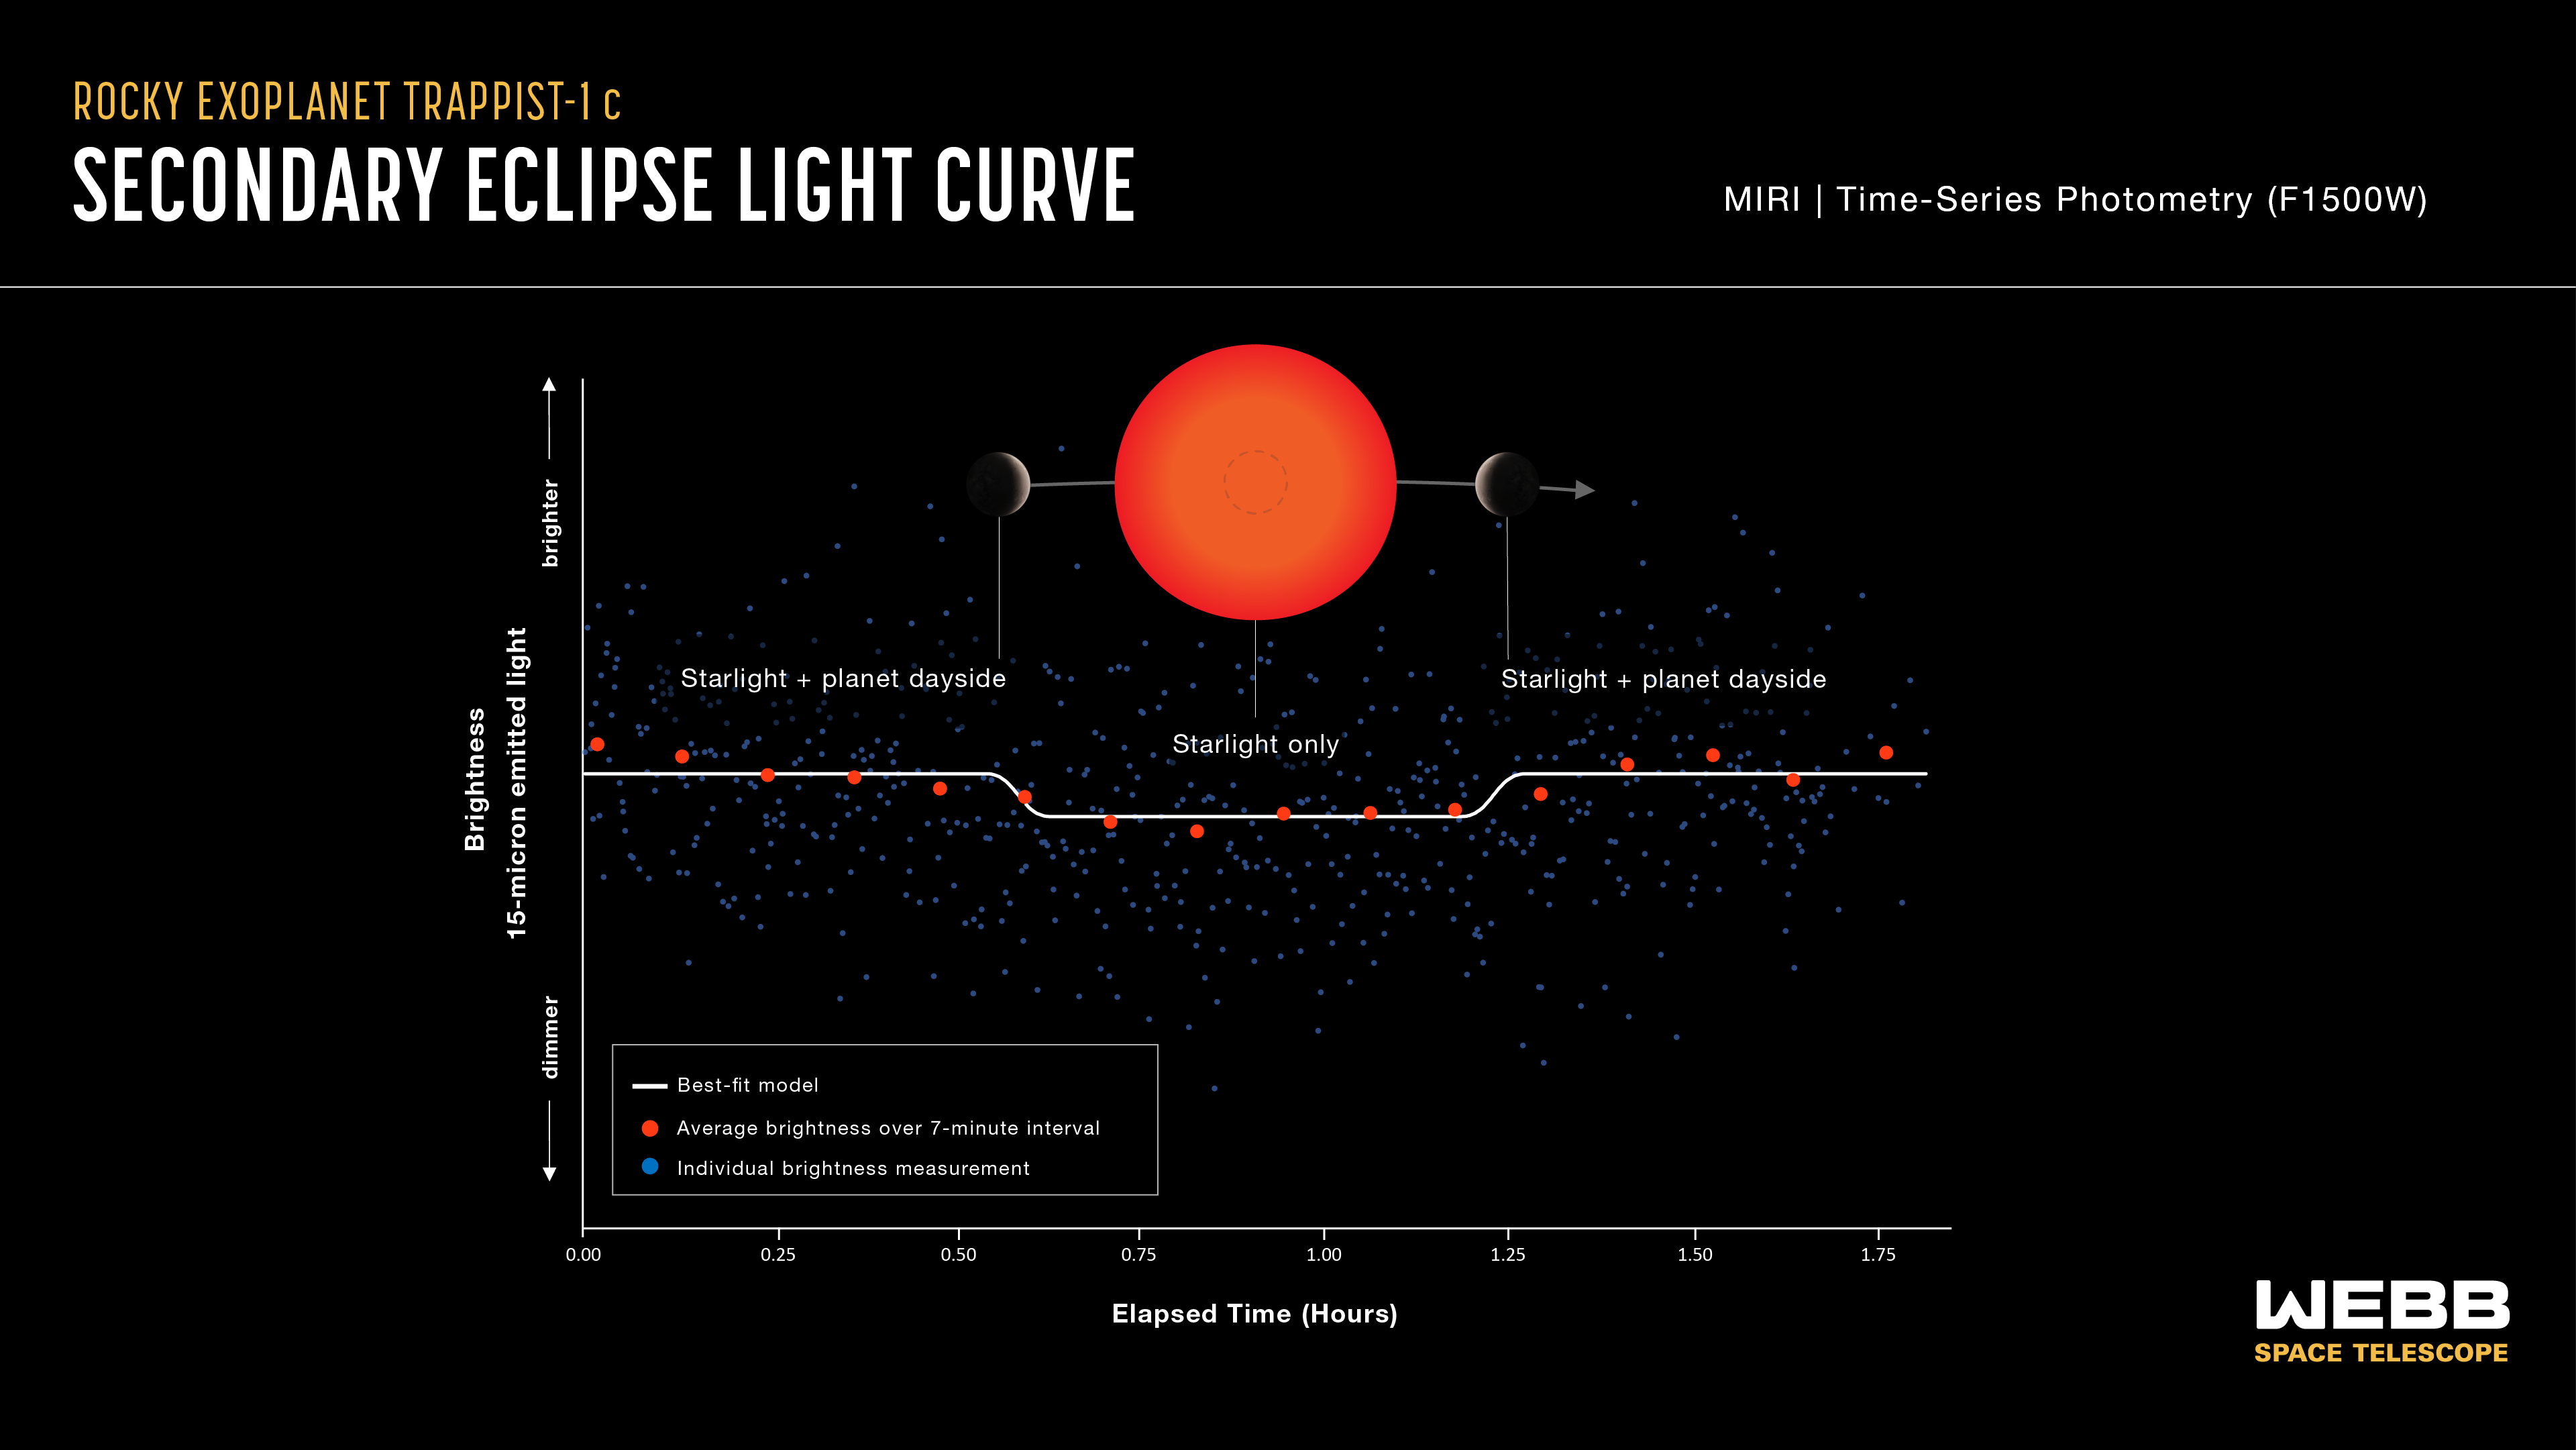

TRAPPIST-1 c light curve

Infrared measurements by the NASA/ESA/CSA James Webb Space Telescope of TRAPPIST-1 c indicate that it is probably not as Venus-like as once imagined. Webb has successfully measured the heat radiating from TRAPPIST-1 c, an exoplanet orbiting a red dwarf star 40 light-years from Earth. With a dayside temperature of about 107 degrees Celsius, it is the coolest rocky planet ever characterised using this method.

This light curve shows the change in brightness of the TRAPPIST-1 system as the second planet, TRAPPIST-1 c, moves behind the star. This phenomenon is known as a secondary eclipse.

Astronomers used Webb’s Mid-Infrared Instrument (MIRI) to measure the brightness of mid-infrared light. When the planet is beside the star, the light emitted by both the star and the dayside of the planet reach the telescope, and the system appears brighter. When the planet is behind the star, the light emitted by the planet is blocked and only the starlight reaches the telescope, causing the apparent brightness to decrease.

Astronomers can subtract the brightness of the star from the combined brightness of the star and planet to calculate how much infrared light is coming from the planet’s dayside. This is then used to calculate the dayside temperature and infer the presence and possible composition of the atmosphere.

The graph shows combined data from four separate observations made using MIRI’s F1500W filter, which only allows light with wavelengths ranging from about 13.5 - 16.7 microns to pass through to the detectors. The blue squares are individual brightness measurements. The red circles show measurements that are “binned,” or averaged to make it easier to see the change over time. The white line is the best fit, or model light curve that matches the data most closely. The decrease in brightness during the secondary eclipse is less than 0.05%.

The temperature calculated from this observation is 380 +/- 31 kelvins (between 76 and 138 degrees Celsius). TRAPPIST-1 c is the coolest rocky exoplanet ever observed using secondary eclipse photometry.

This research was conducted as part of Webb’s General Observers (GO) program 2304, which is one of eight programs from Webb’s first year of science designed to help fully characterise the TRAPPIST-1 system. This coming year, researchers will conduct a follow-up investigation to observe the full orbits of TRAPPIST-1 b and TRAPPIST-1 c. This will make it possible to see how the temperatures change from the day to the night sides of the two planets and will provide further constraints on whether they have atmospheres or not.

Credit: NASA, ESA, CSA, J. Olmsted (STScI), S. Zieba (MPI-A), L. Kreidberg (MPI-A)